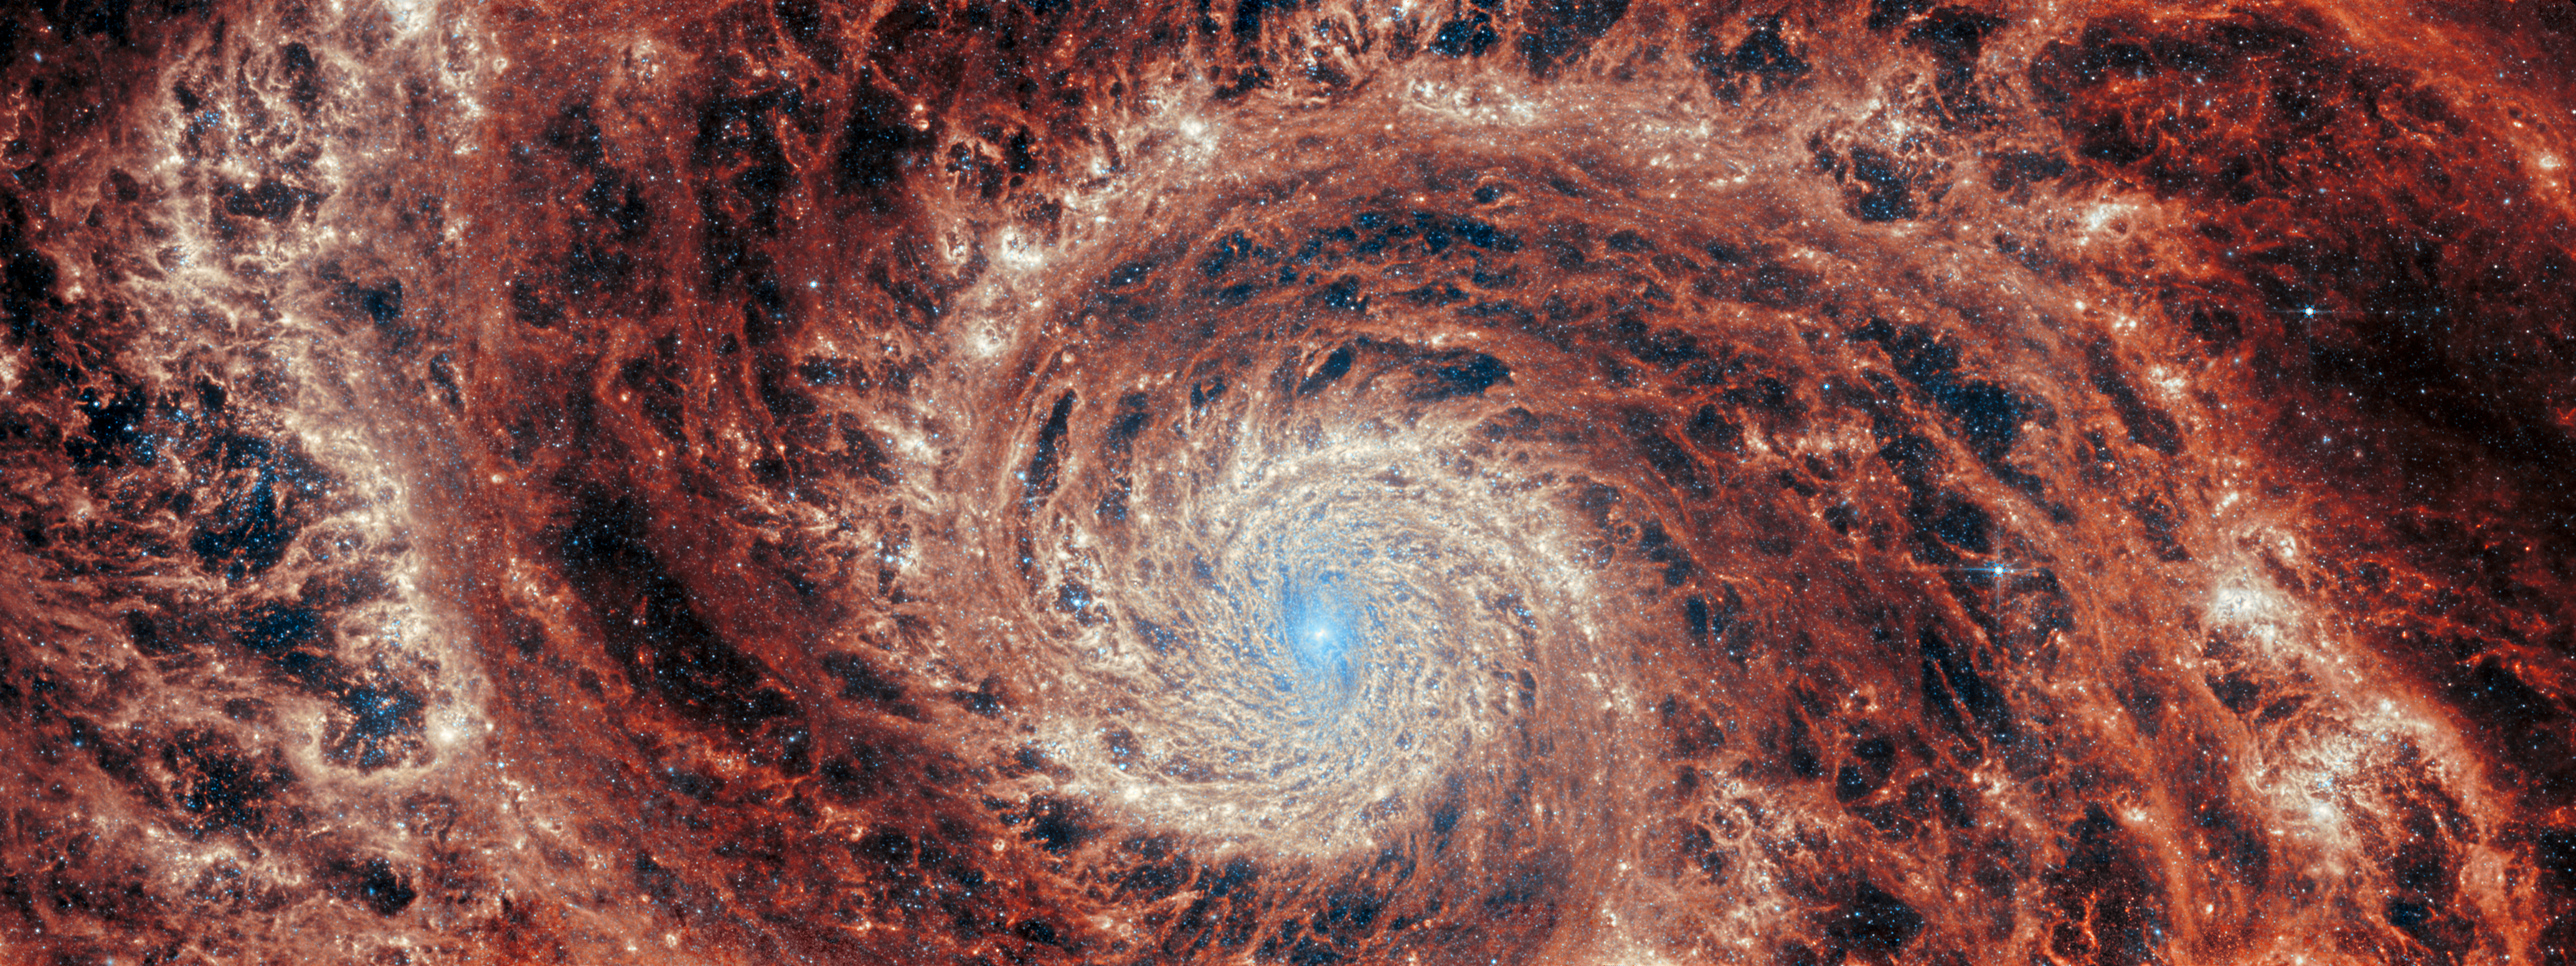

M51 (MIRI image)

The graceful winding arms of the grand-design spiral galaxy M51 stretch across this image from the NASA/ESA/CSA James Webb Space Telescope. Unlike the menagerie of weird and wonderful spiral galaxies with ragged or disrupted spiral arms, grand-design spiral galaxies boast prominent, well-developed spiral arms like the ones showcased in this image. This galactic portrait was captured by Webb’s Mid-InfraRed Instrument (MIRI).

In this image the reprocessed stellar light by dust grains and molecules in the medium of the galaxy illuminate a dramatic filamentary medium. Empty cavities and bright filaments alternate and give the impression of ripples propagating from the spiral arms. The yellow compact regions indicate the newly formed star clusters in the galaxy.

M51 — also known as NGC 5194 — lies about 27 million light-years away from Earth in the constellation Canes Venatici, and is trapped in a tumultuous relationship with its near neighbour, the dwarf galaxy NGC 5195. The interaction between these two galaxies has made these galactic neighbours one of the better-studied galaxy pairs in the night sky. The gravitational influence of M51’s smaller companion is thought to be partially responsible for the stately nature of the galaxy’s prominent and distinct spiral arms. If you would like to learn more about this squabbling pair of galactic neighbours, you can explore earlier observations of M51 by the NASA/ESA Hubble Space Telescope here.

This Webb observation of M51 is one of a series of observations collectively titled Feedback in Emerging extrAgalactic Star clusTers, or FEAST. The FEAST observations were designed to shed light on the interplay between stellar feedback and star formation in environments outside of our own galaxy, the Milky Way. Stellar feedback is the term used to describe the outpouring of energy from stars into the environments which form them, and is a crucial process in determining the rates at which stars form. Understanding stellar feedback is vital to building accurate universal models of star formation.

The aim of the FEAST observations is to discover and study stellar nurseries in galaxies beyond our own Milky Way. Before Webb became operative, other observatories such as the Atacama Large Millimetre Array in the Chilean desert and Hubble have given us a glimpse of star formation either at the onset (tracing the dense gas and dust clouds where stars will form) or after the stars have destroyed with their energy their natal gas and dust clouds. Webb is opening a new window into the early stages of star formation and stellar light, as well as the energy reprocessing of gas and dust. Scientists are seeing star clusters emerging from their natal cloud in galaxies beyond our local group for the first time. They will also be able to measure how long it takes for these stars to pollute with newly formed metals and to clean out the gas (these time scales are different from galaxy to galaxy). By studying these processes, we will better understand how the star formation cycle and metal enrichment are regulated within galaxies as well as what are the time scales for planets and brown dwarfs to form. Once dust and gas is removed from the newly formed stars, there is no material left to form planets.

Credit: ESA/Webb, NASA & CSA, A. Adamo (Stockholm University) and the FEAST JWST team